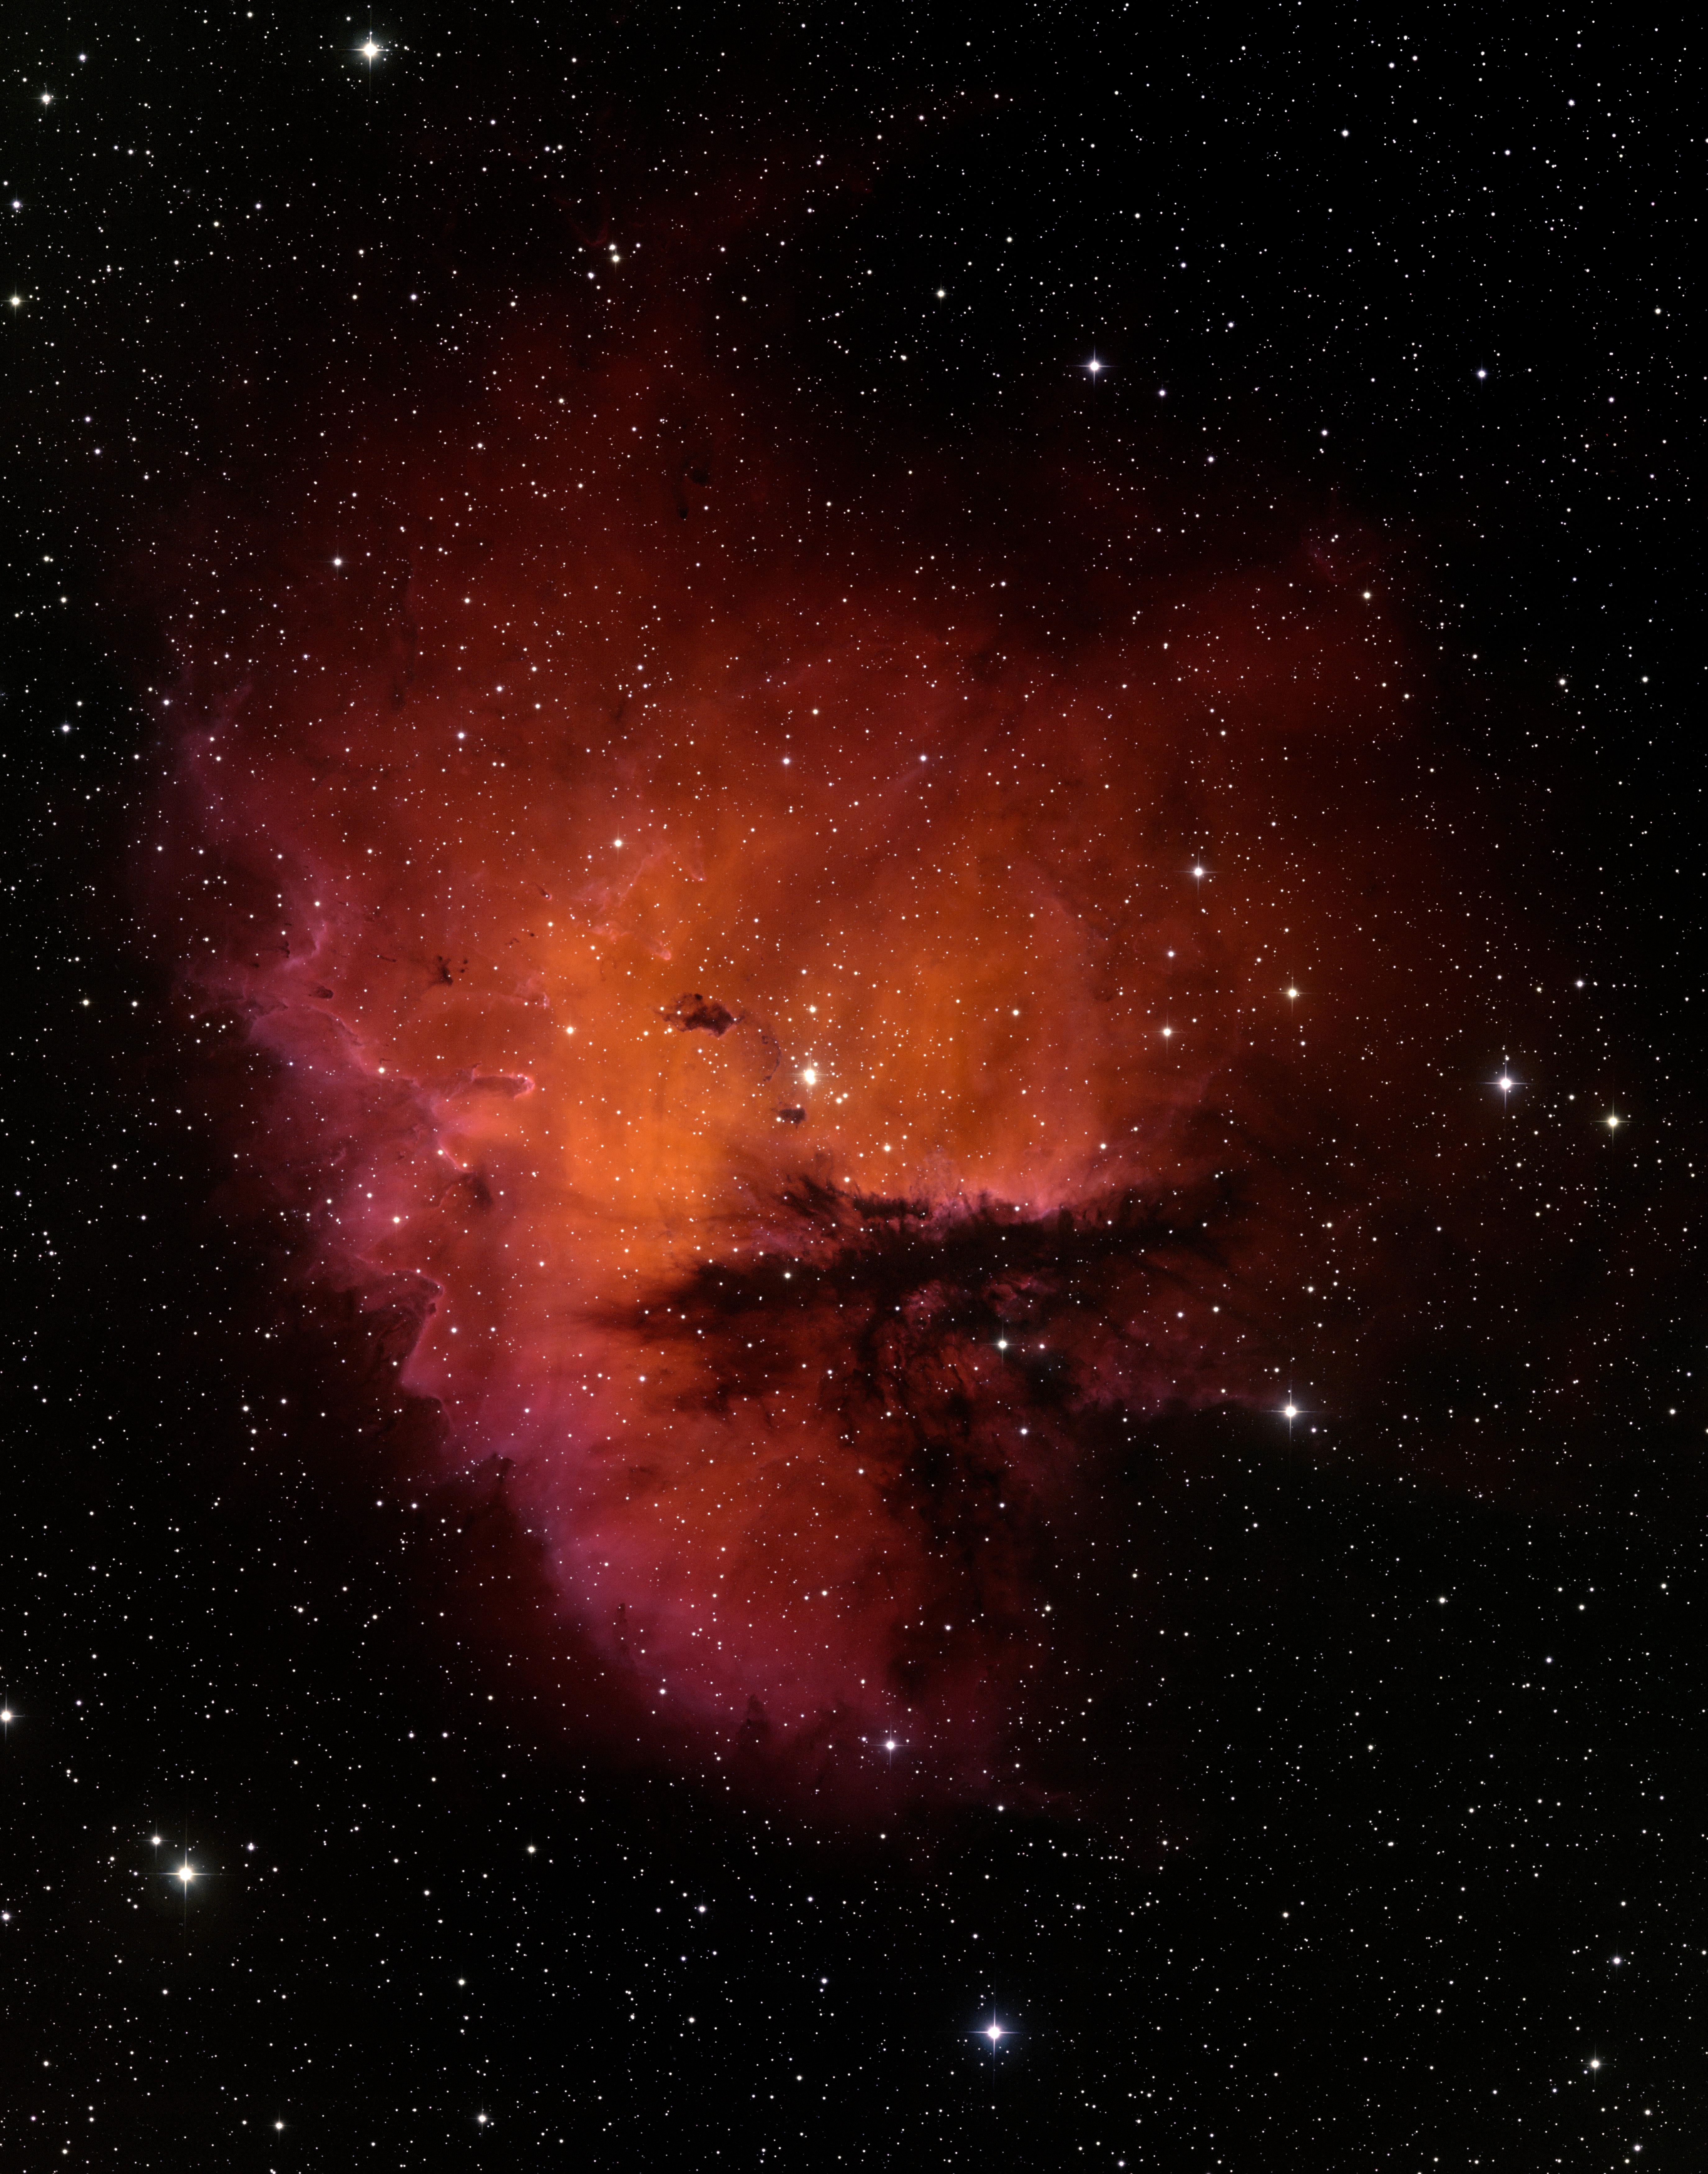

Ground-Based Image of the Star-Forming Region NGC 281

This wide-field view of the star-forming region NGC 281 in the constellation Cassiopeia was taken with the WIYN 0.9-meter telescope at Kitt Peak National Observatory near Tucson, AZ.

Credit: T.A. Rector/University of Alaska Anchorage and WIYN/AURA/NSF